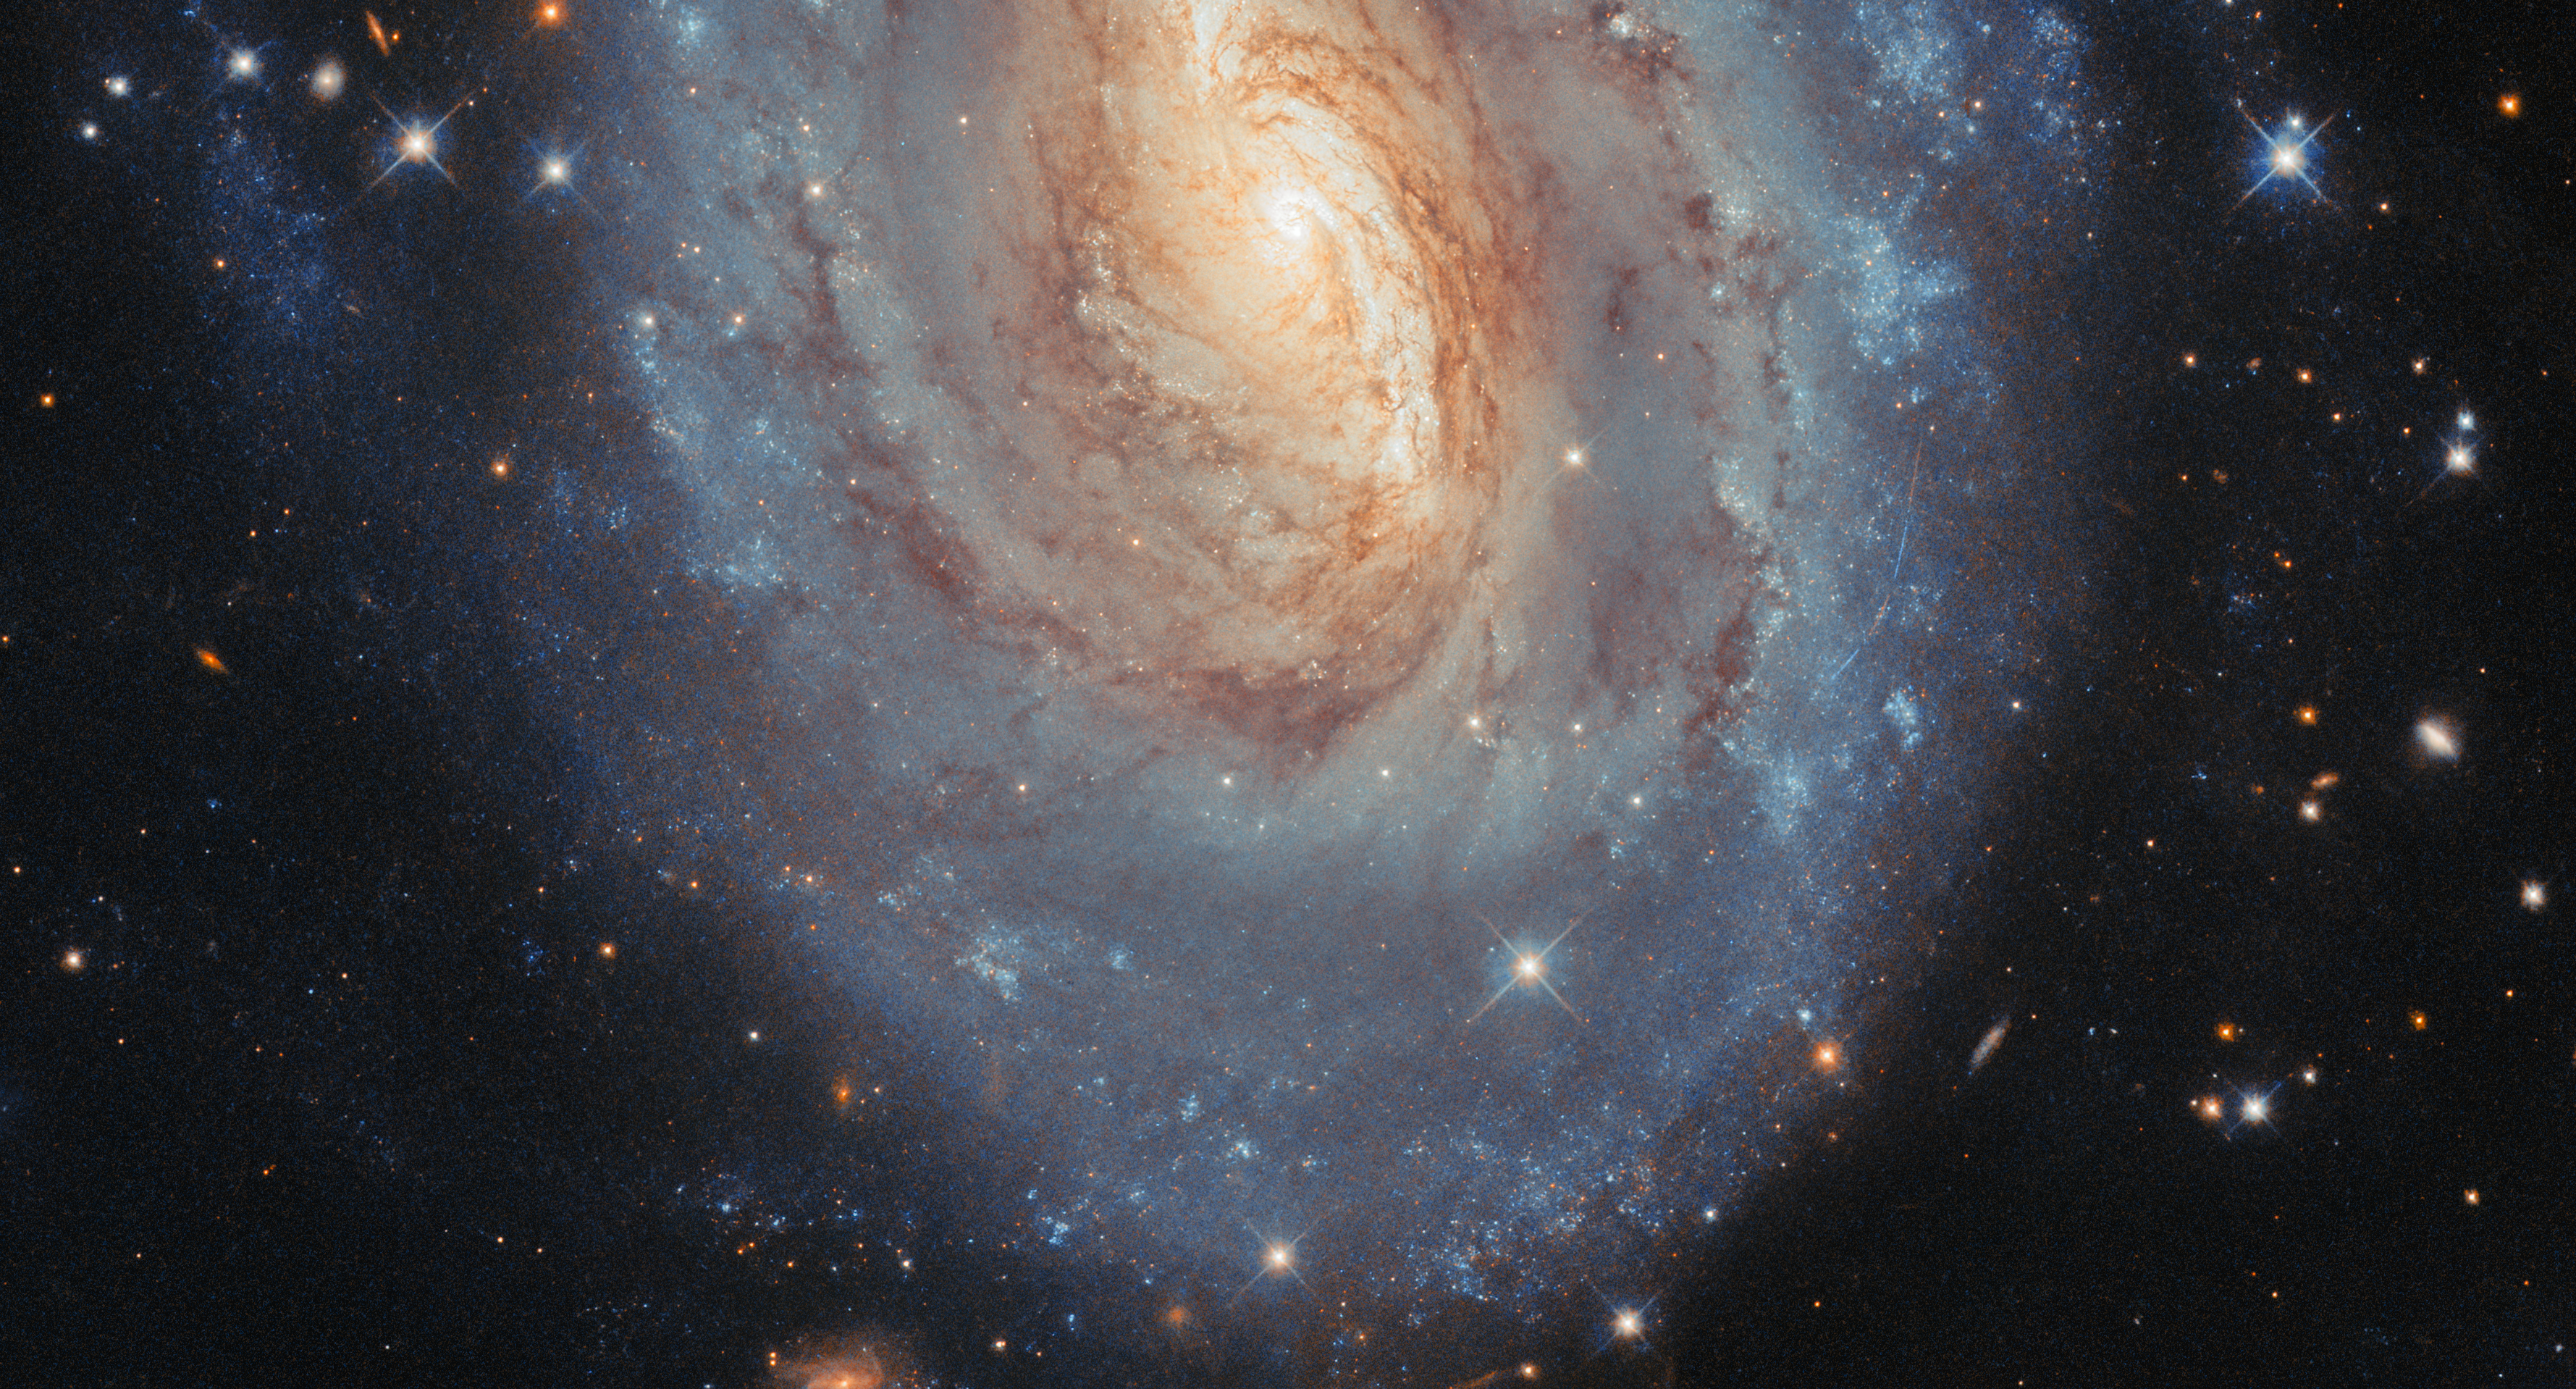

Yellow and blue, old and new

Stars of all ages are on display in today’s NASA/ESA Hubble Space Telescope Picture of the Week. This sparkling spiral galaxy is called NGC 6000 and it is located 102 million light-years away in the constellation Scorpius.

This galaxy has a glowing yellow centre and glittering blue outskirts. The colours reflect differences in the average ages, masses and temperatures of the galaxy’s stars. In the heart of the galaxy, the stars tend to be older and smaller. Less massive stars are cooler than more massive stars, and somewhat counterintuitively, cooler stars are redder, while hotter stars are bluer. Farther out along NGC 6000’s spiral arms, brilliant star clusters host young, massive stars that appear distinctly blue.

Hubble collected the data for this image while surveying the sites of recent supernova explosions in nearby galaxies. NGC 6000 has hosted two recent supernovae: SN 2007ch in 2007 and SN 2010as in 2010. Using Hubble’s sensitive detectors, researchers are able to discern the faint glow of supernovae years after the initial explosion. These observations help to constrain the masses of supernova progenitor stars and can indicate if they had any stellar companions.

By zooming in to the right side of the galaxy’s disc in this image, you may see something else yellow and blue: a set of four thin lines. These are an asteroid in our Solar System, which was drifting across Hubble’s field of view as it gazed at NGC 6000. The four streaks are due to different exposures that were recorded one after another with slight pauses in between. These were combined to create this final image. The colours appear this way because each exposure used a filter to collect only very specific wavelengths of light, in this case around red and blue. Having these separate exposures is important to study and compare stars by their colours — but it also makes asteroid interlopers very obvious!

Credit: ESA/Hubble & NASA, A. Filippenko Acknowledgement: M. H. Özsaraç